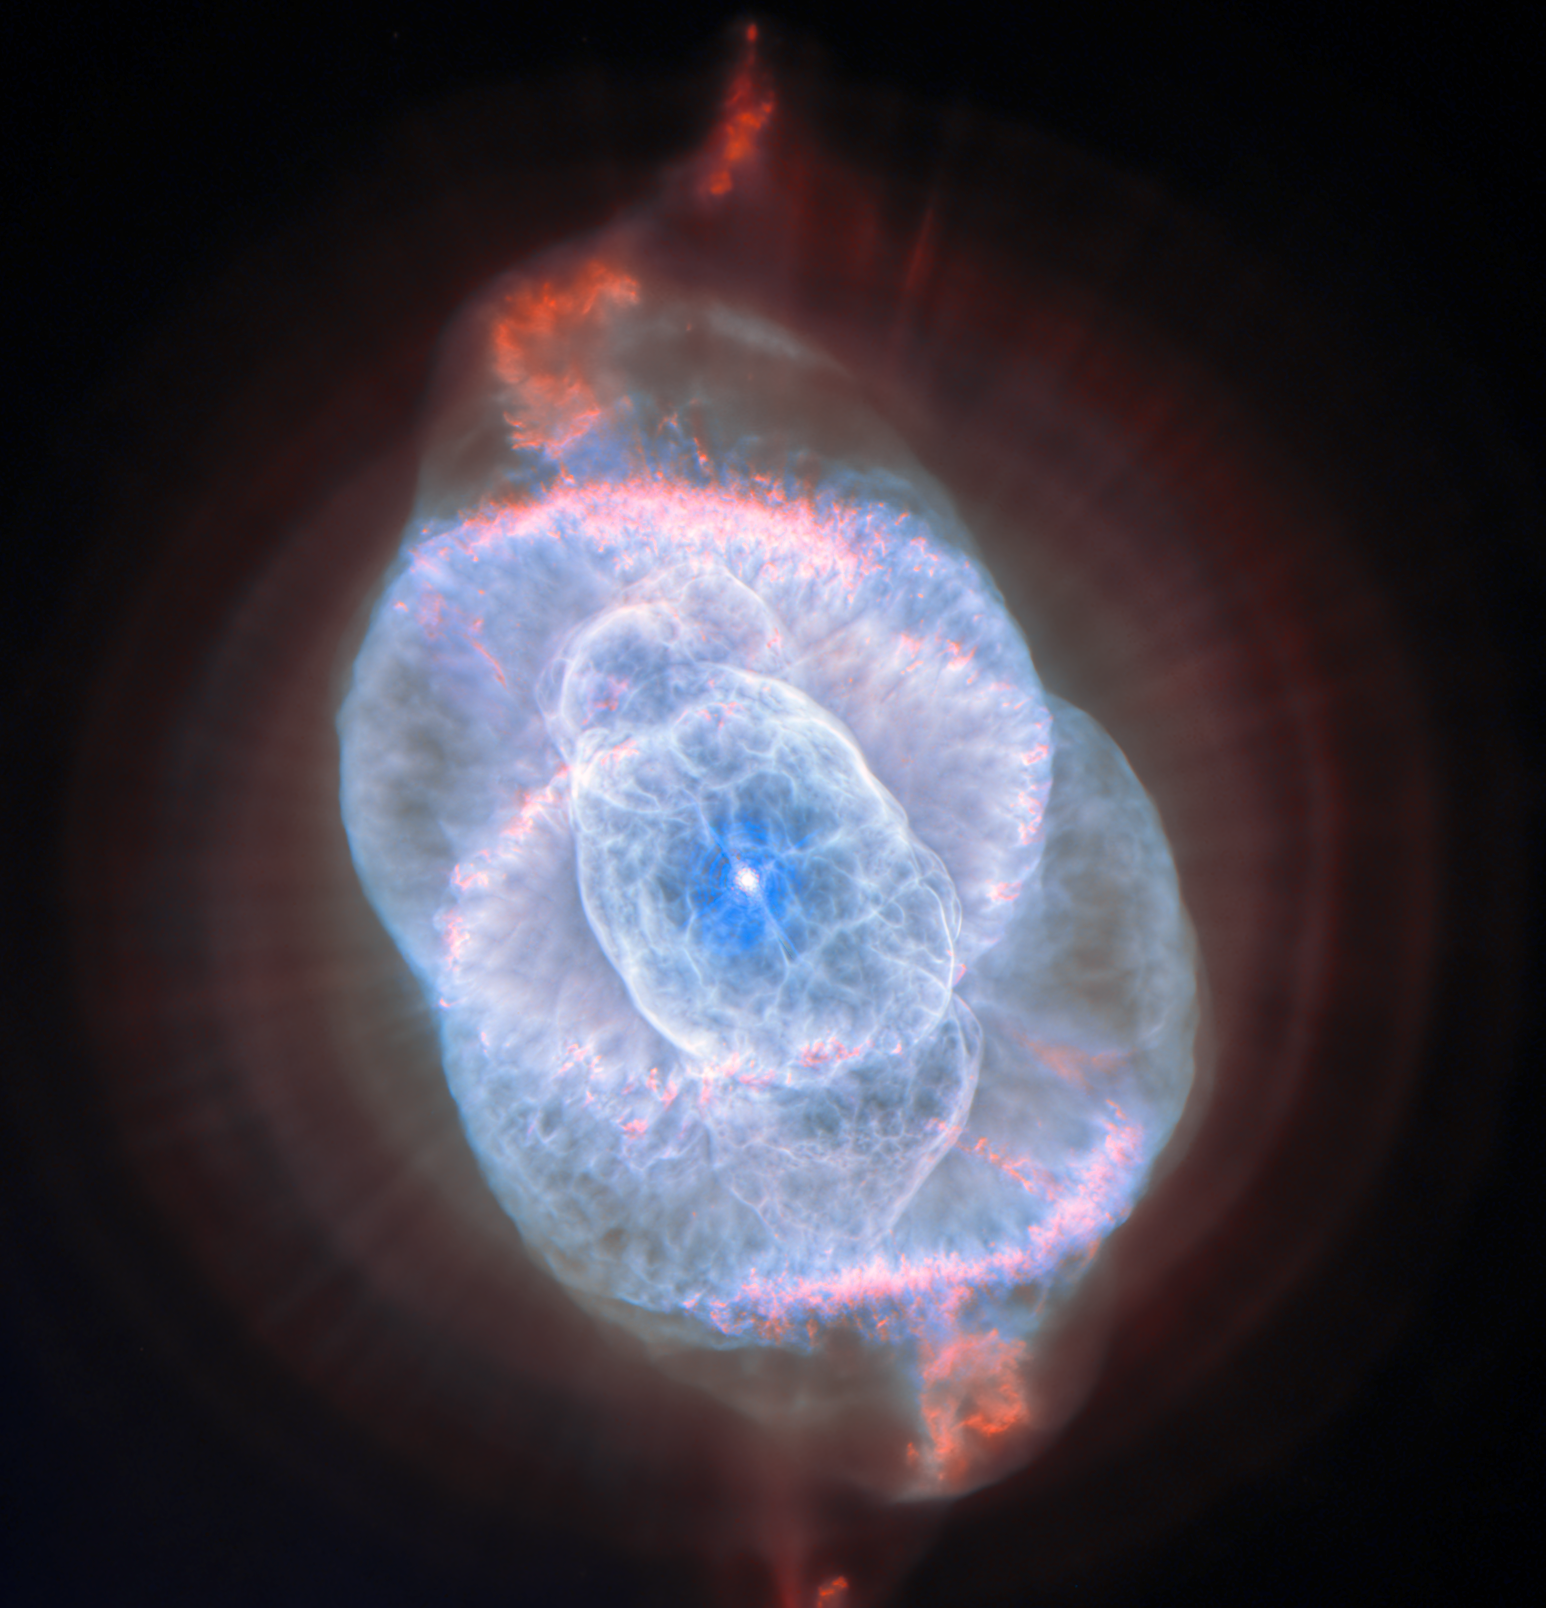

Looking at the Cat’s Eye Nebula with Hubble

For this month’s ESA/Hubble Picture of the Month, we turn our gaze to one of the most visually intricate remnants of a dying star: the Cat’s Eye Nebula, also known as NGC 6543. This extraordinary planetary nebula has captivated astronomers for decades with its elaborate and multilayered structure. Observations with ESA’s Gaia mission place the nebula at a distance of 4 400 light years away.

Planetary nebulae, so-called because of their round shape when viewed through early telescopes, are in fact expanding gas thrown off by stars in their final stages of evolution. It was the Cat’s Eye Nebula itself where this fact was first discovered in 1864 — examining the spectrum of its light reveals the emission from individual molecules that’s characteristic of a gas, distinguishing planetary nebulae from stars and galaxies.

The NASA/ESA Hubble Space Telescope also revolutionised our understanding of planetary nebulae; its detailed images showed that the simple, circular appearance of a planetary nebula seen from the ground belies a very complex morphology. This was particularly true of the Cat’s Eye Nebula, where Hubble’s images in 1995 revealed never-before-seen structures that broadened our understanding of how planetary nebulae come to be.

In this new image, Hubble captures the very core of the billowing gas with the High Resolution Channel sub-instrument on its Advanced Camera for Surveys (ACS). This instrument is optimised for capturing very sharp images of fine details in a small area, such as the complex features at the heart of the Cat’s Eye Nebula. The data reveal a tapestry of concentric shells, jets of high-speed gas and dense knots sculpted by shock interactions, features that appear almost surreal in their intricacy. These structures are believed to record episodic mass loss from the dying star at the nebula’s centre, creating a kind of cosmic “fossil record” of its final evolutionary stages.

Part of these data were also used in a previous image of the Cat’s Eye Nebula, released in 2004. Previously unused data from ACS is combined with state-of-the-art image processing to create this new image, the sharpest yet taken of this nebula.

Credit: ESA/Hubble & NASA, Z. Tsvetanov